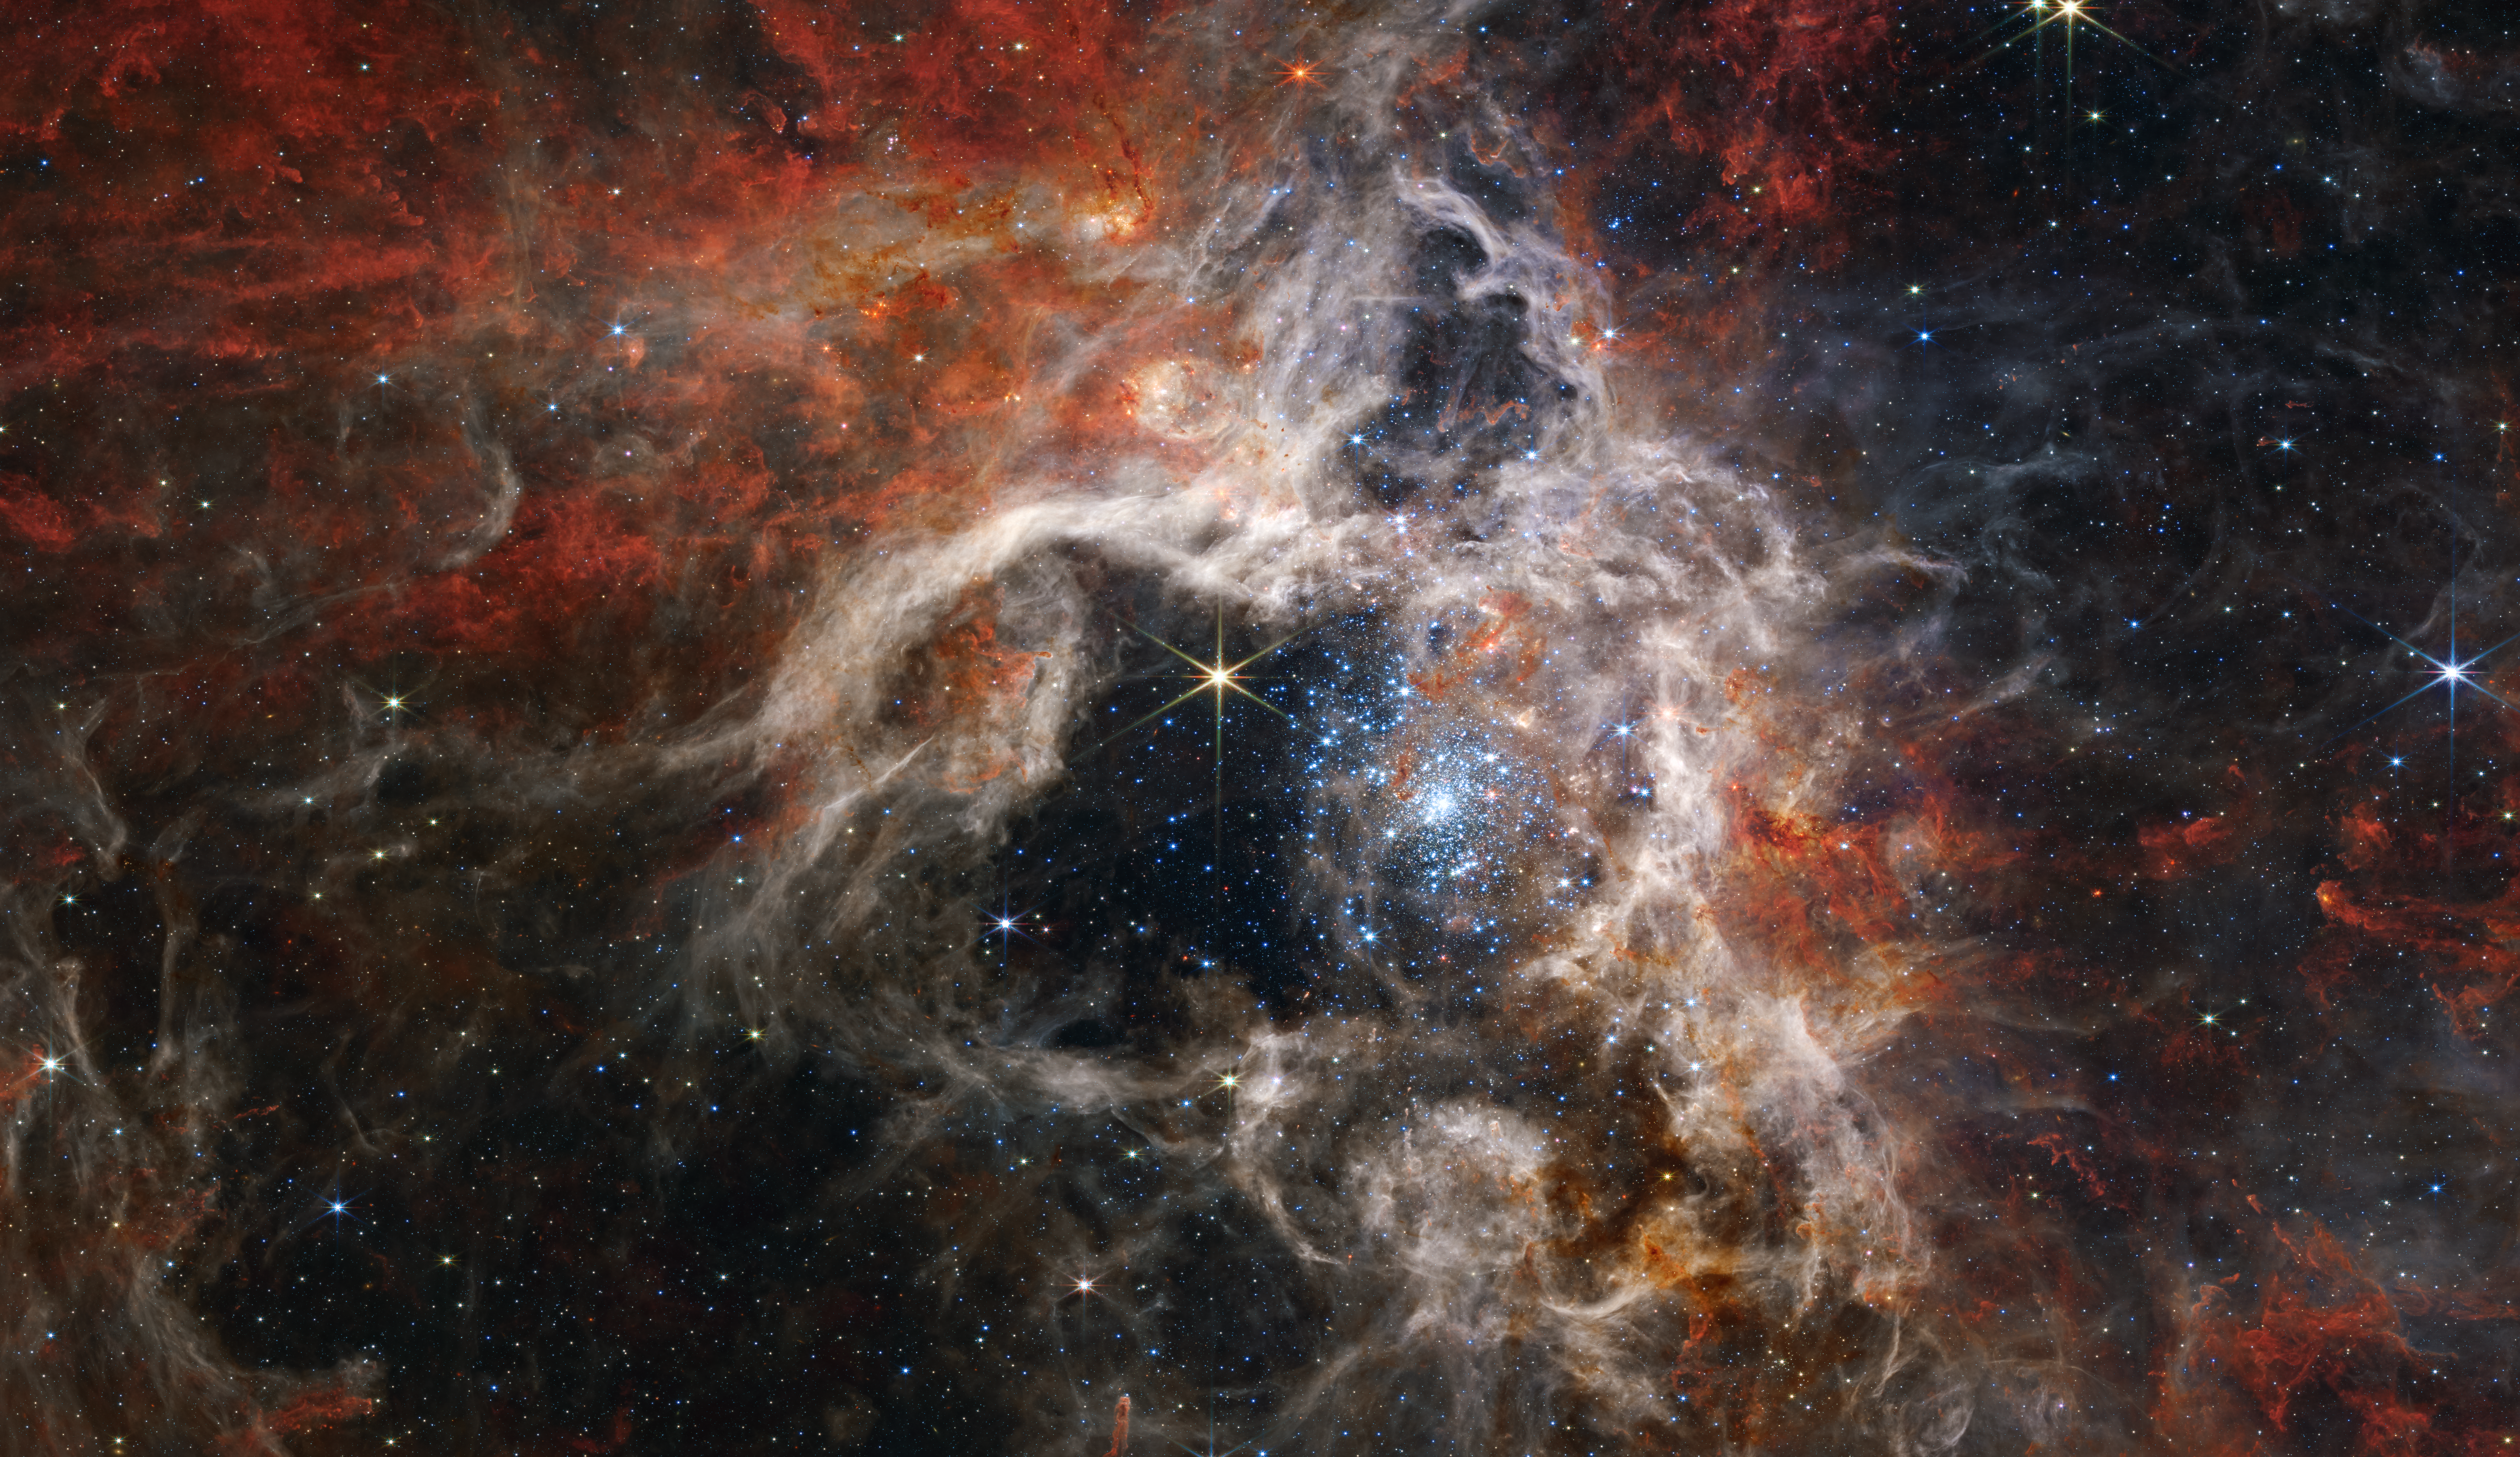

Tarantula Nebula (NIRCam Image)

In this mosaic image stretching 340 light-years across, Webb’s Near-Infrared Camera (NIRCam) displays the Tarantula Nebula star-forming region in a new light, including tens of thousands of never-before-seen young stars that were previously shrouded in cosmic dust. The most active region appears to sparkle with massive young stars, appearing pale blue. Scattered among them are still-embedded stars, appearing red, yet to emerge from the dusty cocoon of the nebula. NIRCam is able to detect these dust-enshrouded stars thanks to its unprecedented resolution at near-infrared wavelengths.

To the upper left of the cluster of young stars, and the top of the nebula’s cavity, an older star prominently displays NIRCam’s distinctive eight diffraction spikes, an artefact of the telescope’s structure. Following the top central spike of this star upward, it almost points to a distinctive bubble in the cloud. Young stars still surrounded by dusty material are blowing this bubble, beginning to carve out their own cavity. Astronomers used two of Webb’s spectrographs to take a closer look at this region and determine the chemical makeup of the star and its surrounding gas. This spectral information will tell astronomers about the age of the nebula and how many generations of star birth it has seen.

Farther from the core region of hot young stars, cooler gas takes on a rust colour, telling astronomers that the nebula is rich with complex hydrocarbons. This dense gas is the material that will form future stars. As winds from the massive stars sweep away gas and dust, some of it will pile up and, with gravity’s help, form new stars.

Credit: NASA, ESA, CSA, and STScI